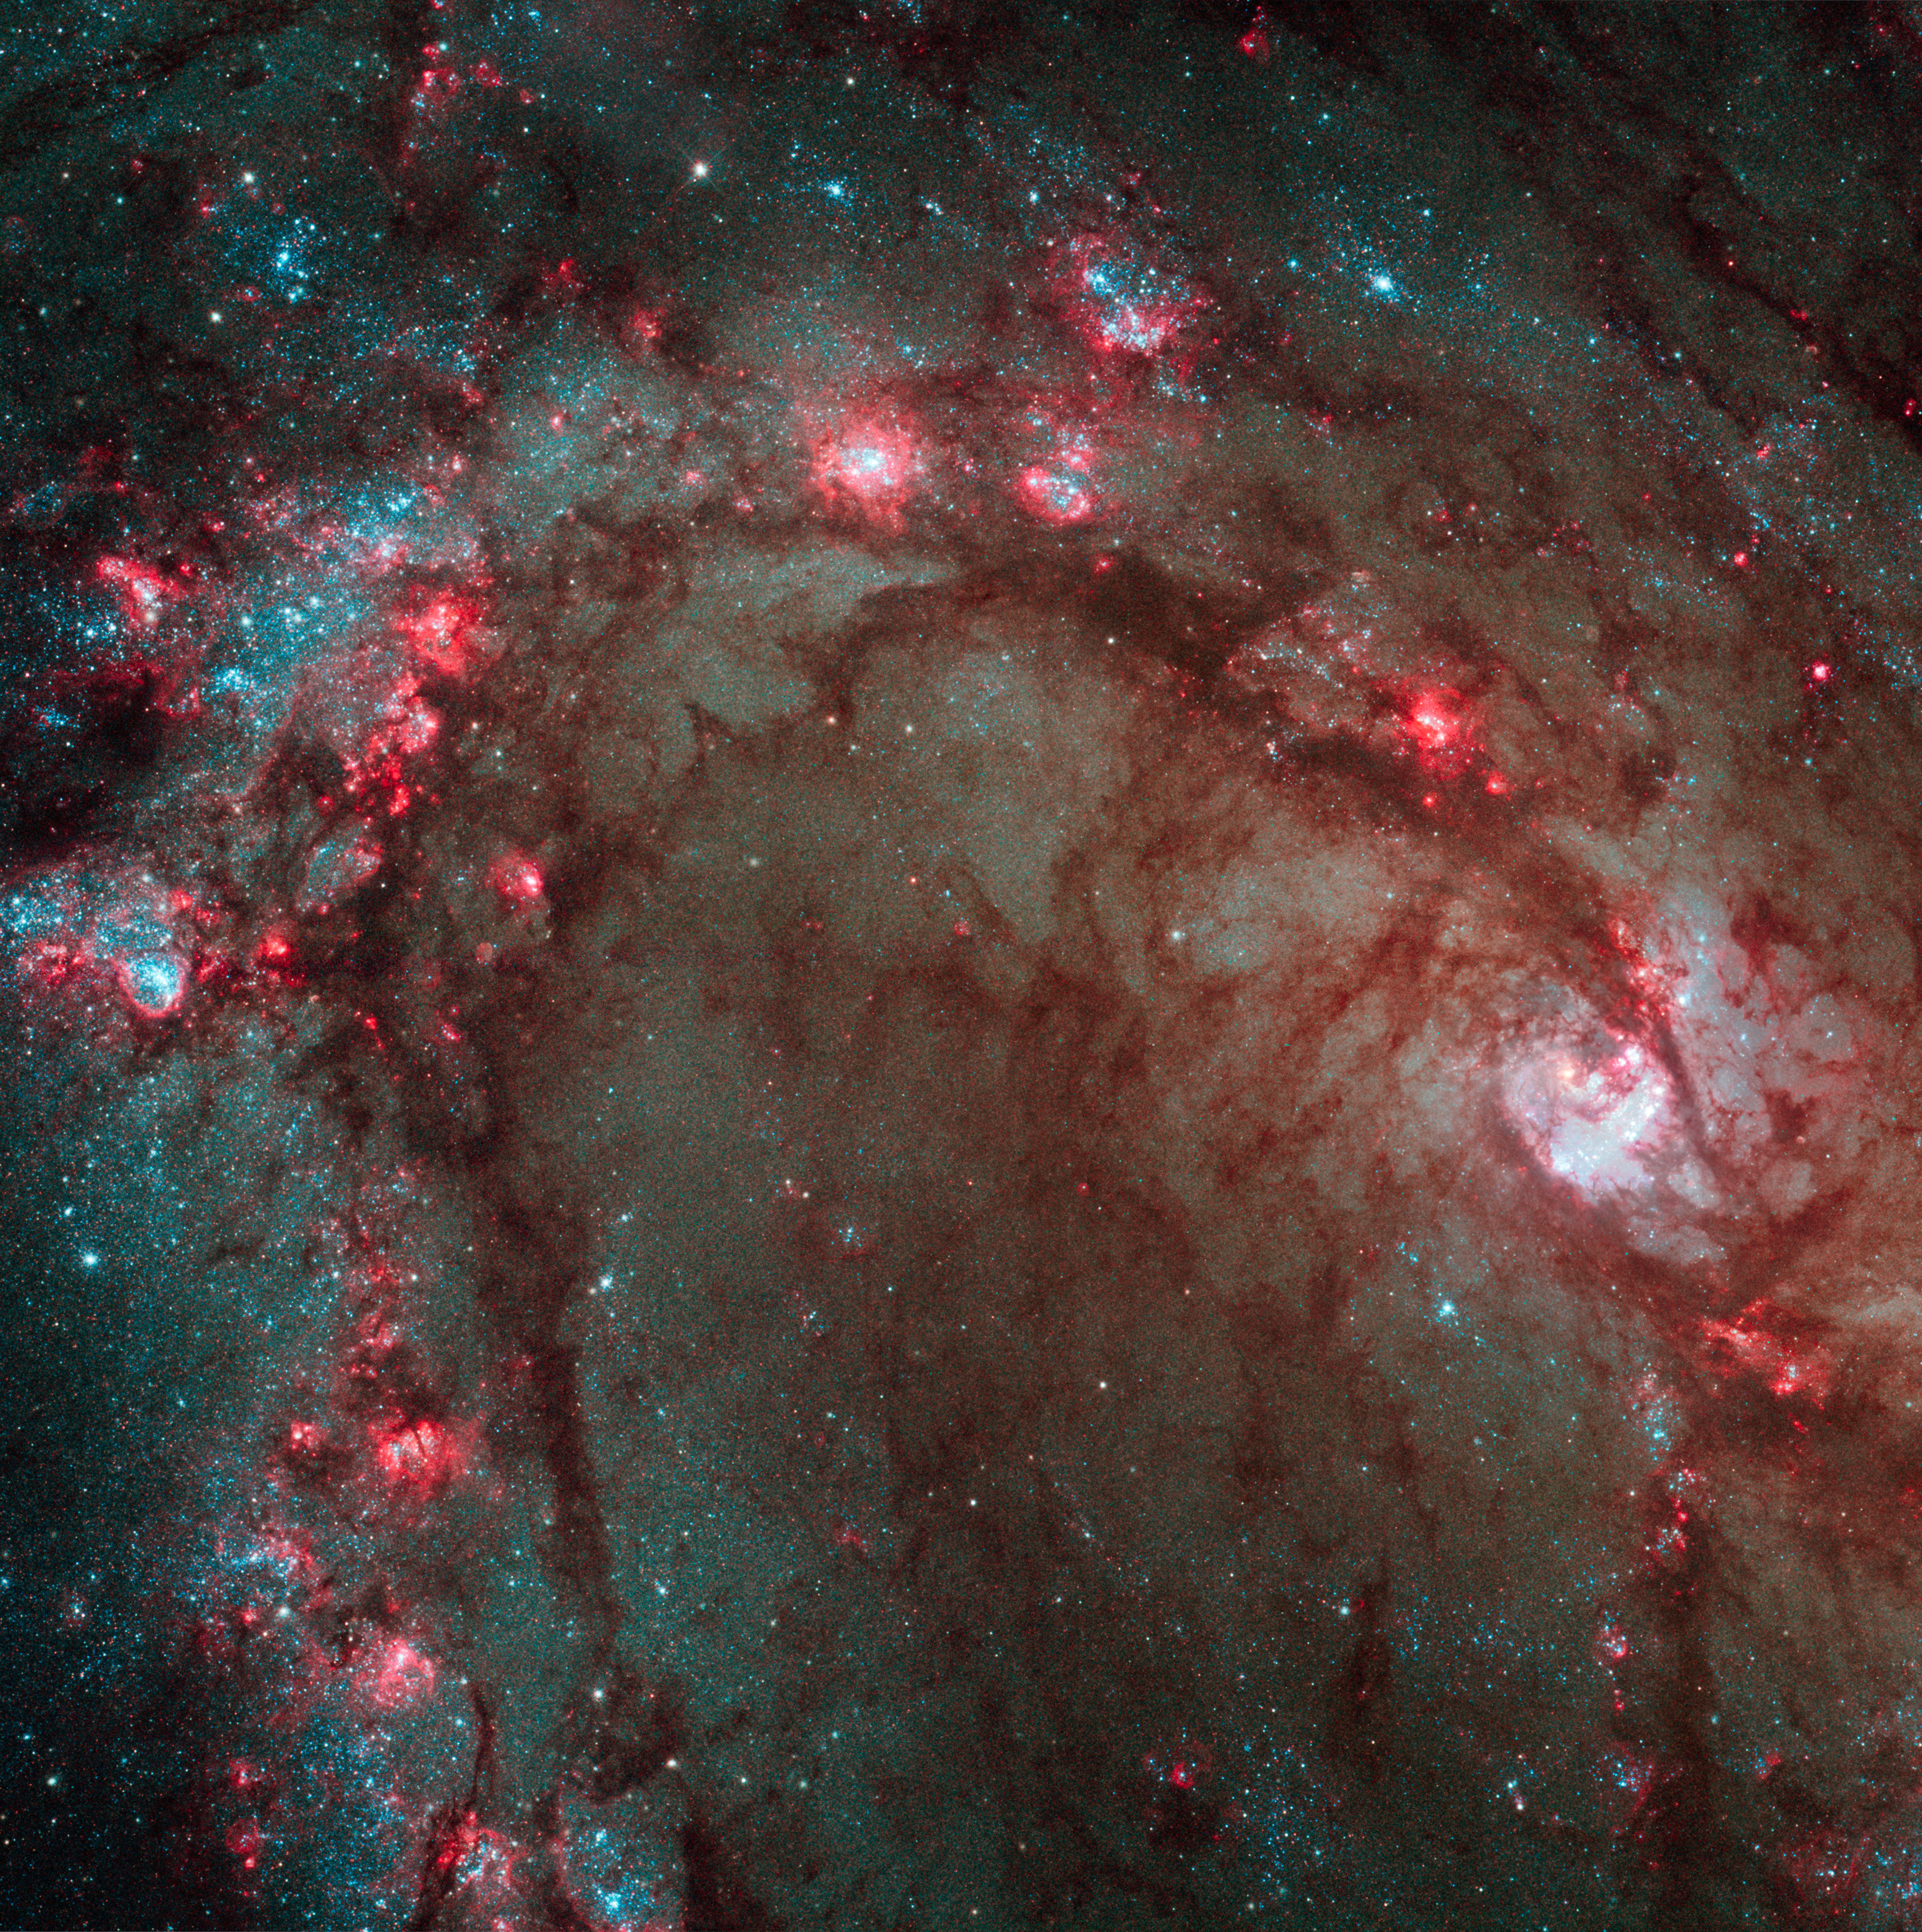

Hubble Wide Field Camera 3 image details star birth in galaxy M83

The spectacular new camera installed on the NASA/ESA Hubble Space Telescope during Servicing Mission 4 in May has delivered the most detailed view of star birth in the graceful, curving arms of the nearby spiral galaxy M83.

Nicknamed the Southern Pinwheel, M83 is undergoing more rapid star formation than our own Milky Way galaxy, especially in its nucleus. The sharp "eye" of the Wide Field Camera 3 (WFC3) has captured hundreds of young star clusters, ancient swarms of globular star clusters, and hundreds of thousands of individual stars, mostly blue supergiants and red supergiants.

The image, taken in August 2009, provides a close-up view of the myriad stars near the galaxy's core, the bright whitish region at far right.

WFC3's broad wavelength range, from ultraviolet to near-infrared, reveals stars at different stages of evolution, allowing astronomers to dissect the galaxy's star-formation history.

The image reveals in unprecedented detail the current rapid rate of star birth in this famous "grand design" spiral galaxy. The newest generations of stars are forming largely in clusters on the edges of the dark dust lanes, the backbone of the spiral arms. These fledgling stars, only a few million years old, are bursting out of their dusty cocoons and producing bubbles of reddish glowing hydrogen gas.

The excavated regions give a colourful "Swiss cheese" appearance to the spiral arm. Gradually, the young stars' fierce winds (streams of charged particles) blow away the gas, revealing bright blue star clusters. These stars are about 1 million to 10 million years old. The older populations of stars are not as blue.

A bar of stars, gas, and dust slicing across the core of the galaxy may be instigating most of the star birth in the galaxy's core. The bar funnels material to the galaxy's centre, where the most active star formation is taking place. The brightest star clusters reside along an arc near the core.

The remains of about 60 supernova blasts, the deaths of massive stars, can be seen in the image, five times more than known previously in this region. WFC3 identified the remnants of exploded stars. By studying these remnants, astronomers can better understand the nature of the progenitor stars, which are responsible for the creation and dispersal of most of the galaxy's heavy elements.

M83, located in the Southern Hemisphere, is often compared to M51, dubbed the Whirlpool galaxy, in the Northern Hemisphere. Located 15 million light-years away in the constellation Hydra, M83 is two times closer to Earth than M51.

Credit: NASA, ESA and the Hubble Heritage Team (STScI/AURA)